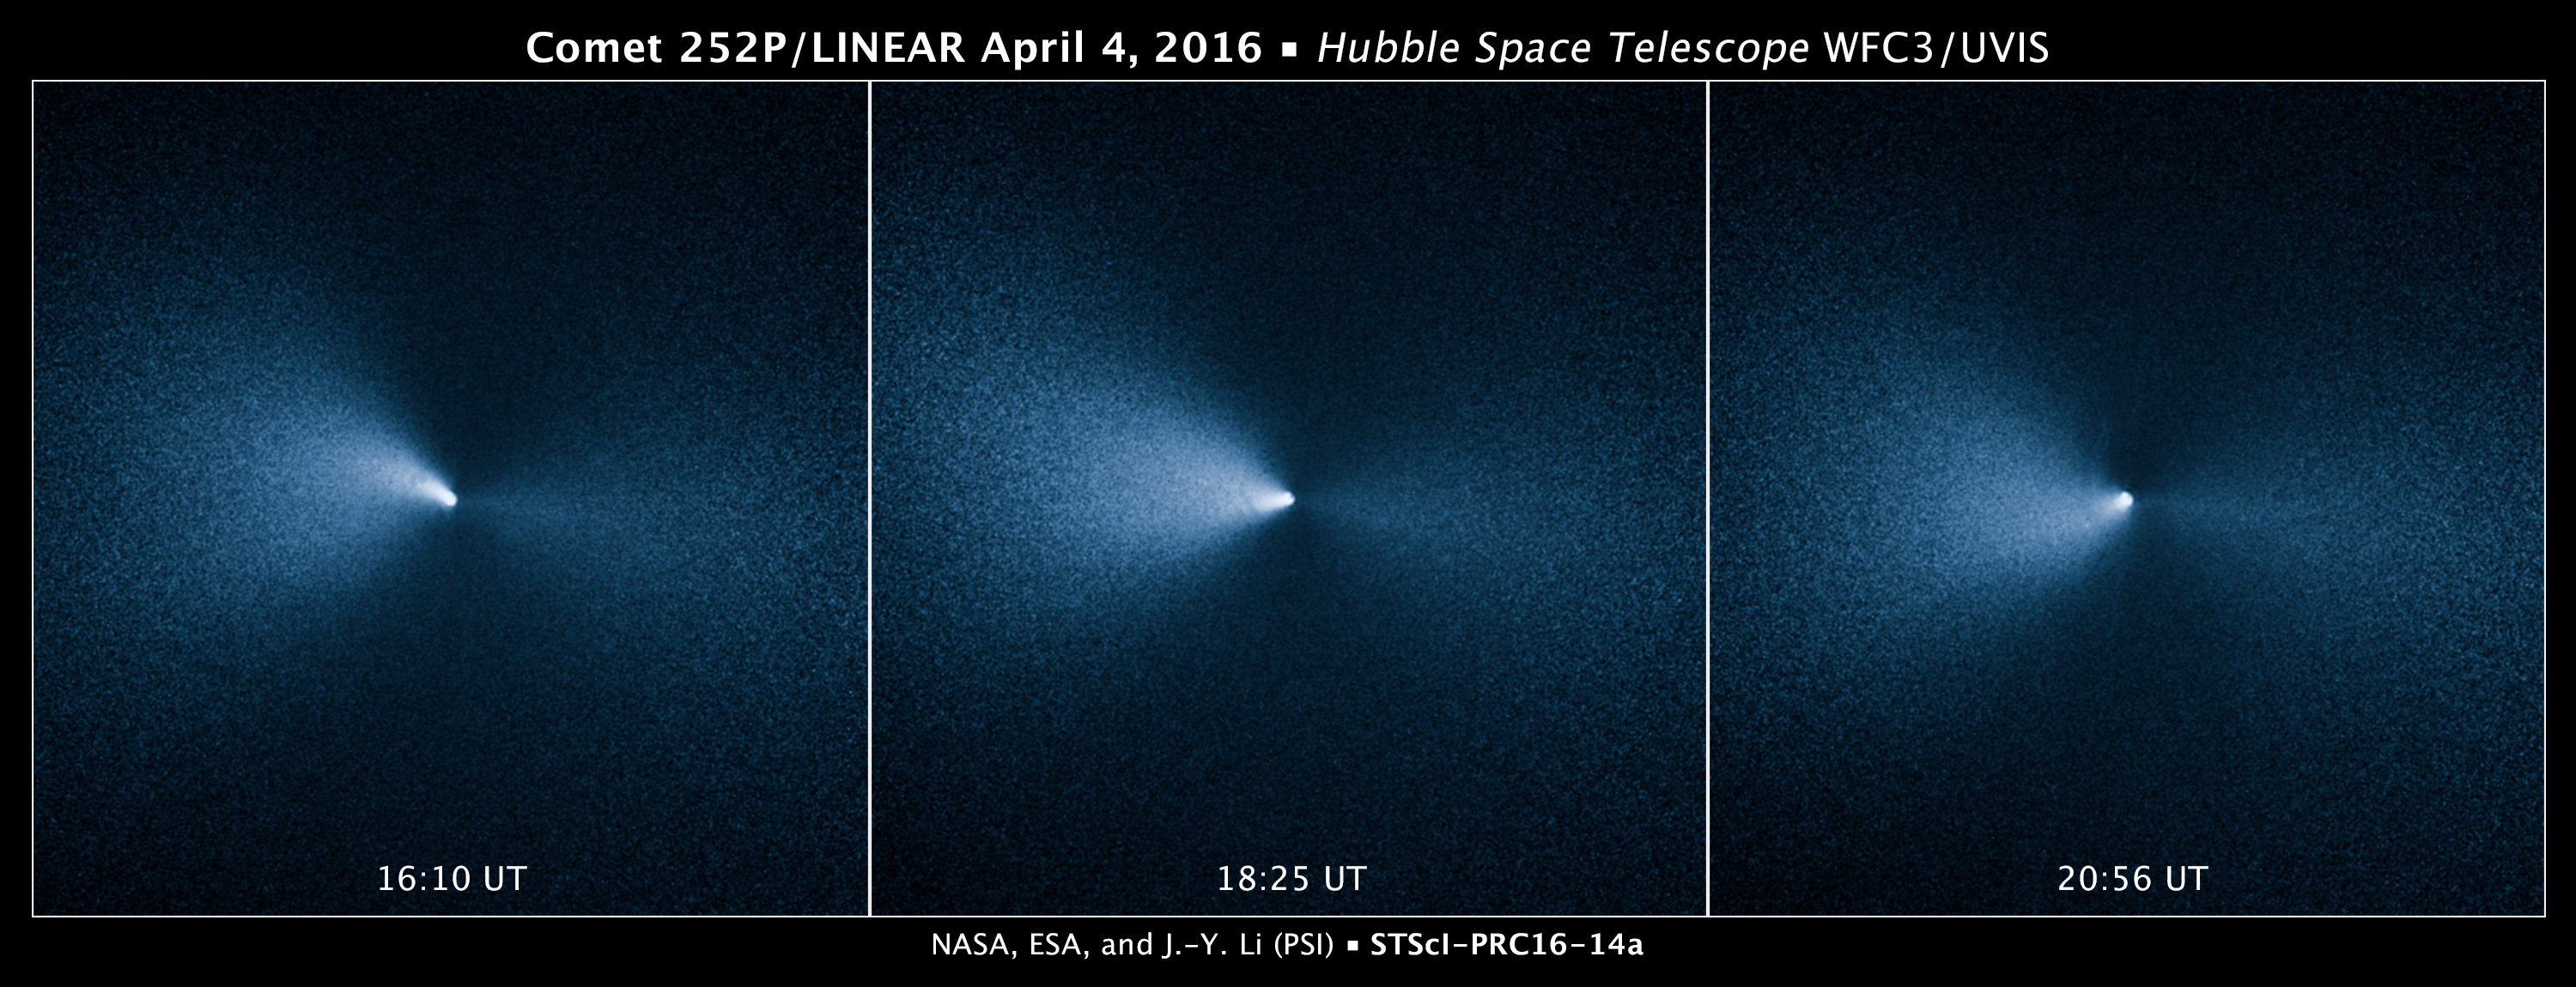

Comet 252P/LINEAR

This sequence of images taken by the NASA/ESA Hubble Space Telescope shows Comet 252P/LINEAR as it passed by Earth. The visit was one of the closest encounters between a comet and our planet.

The images were taken on 4 April, 2016, roughly two weeks after the icy visitor made its closest approach to Earth on 21 March. The comet traveled within 5.3 million kilometres of Earth, or about 14 times the distance between our planet and the Moon. These observations also represent the closest celestial object Hubble has observed, other than the Moon.

The images reveal a narrow, well-defined jet of dust ejected by the comet's icy, fragile nucleus. The nucleus is too small for Hubble to resolve. Astronomers estimate that it is about one kilometre across. A comet produces jets of material as it travels close to the Sun in its orbit. Sunlight warms ices in a comet's nucleus, resulting in large amounts of dust and gas being ejected, sometimes in the form of jets. The jet in the Hubble images is illuminated by sunlight.

The jet also appears to change direction in the images, which is evidence that the comet's nucleus is spinning. The spinning nucleus makes the jet appear to rotate like the water jet from a rotating lawn sprinkler. The images underscore the dynamics and volatility of a comet's fragile nucleus.

Comet 252P/LINEAR is traveling away from Earth and the Sun; its orbit will bring it back to the inner Solar System in 2021, but not anywhere close to Earth.

These visible-light images were taken with Hubble's Wide Field Camera 3.

Credit: NASA, ESA, and J.-Y. Li (Planetary Science Institute)